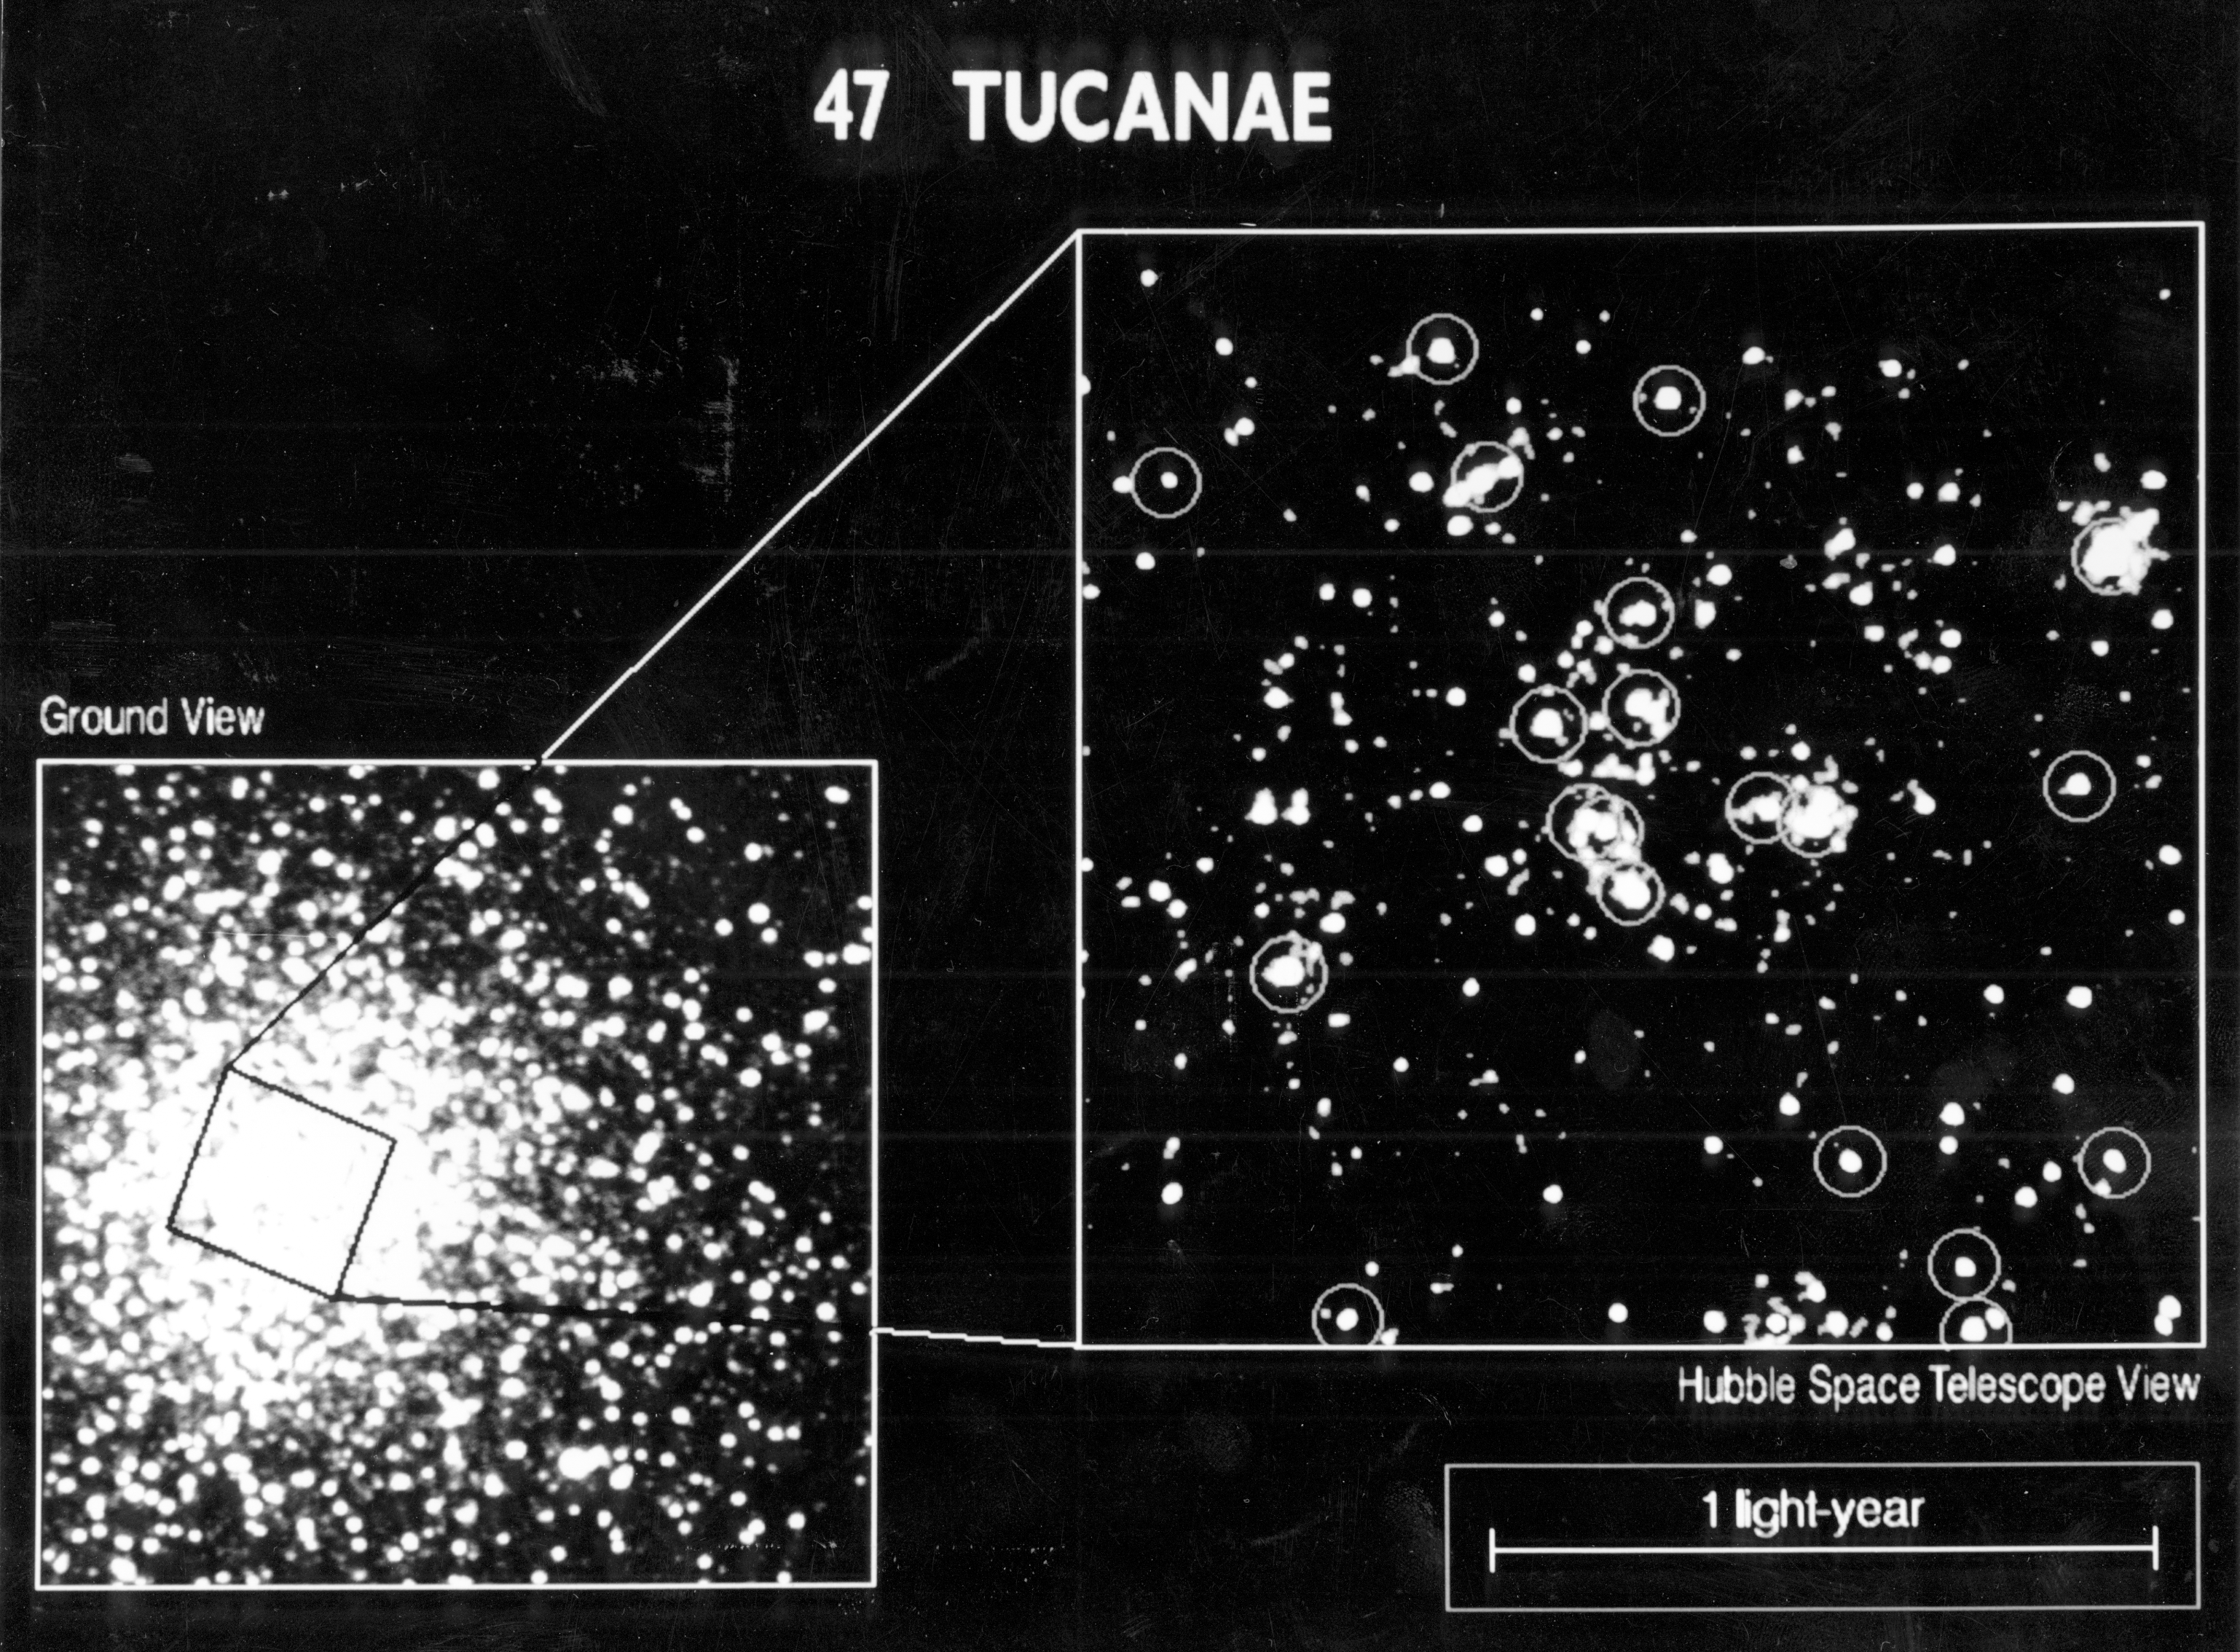

47 Tucanae core - ground based vs. HST resolution

[RIGHT] The core of the globular cluster 47 Tucanae, as imaged by the European Space Agency's Faint Object Camera (FOC) onboard NASA/ESA Hubble Space Telescope. The FOC resolves several hundred stars where ground-based images only yield a few dozen stars. The image reveals so-called blue straggler stars (encircled) which are exceptionally bright in ultraviolet light. HST's UV sensitivity and high resolution allow it to easily separate the blue stragglers from the red giant stars which dominate the cluster.

Blue straggler stars may evolve from "old age" back to a hotter and brighter youth through stellar collisions and mergers. This high concentration of blue stragglers towards the core of 47 Tucanae suggests they are significantly more massive than most of the cluster's stars. Some of blue stragglers could be massive because they are really double star systems. Such binary systems may influence the motions of thousands of other stars within the cluster. The FOC observations were made in ultraviolet light (2200 angstroms) on November 16, 1990 with the FOC in F/96 mode. Field of view is 11 X 11 arc seconds corresponding to a width of .75 light years, at 47 Tucanae's distance of 15,000 light years. Resolution is 0.1 arc second.

Credit: NASA/ESA